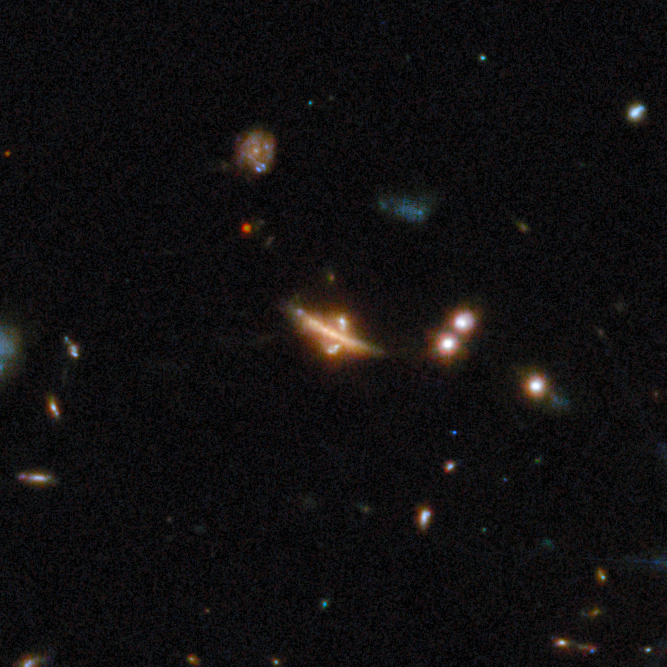

Gravitational lens COSJ100025+015245

Somewhat resembling a ringed planet at first glance, this lens is markedly different from the others presented in the Picture of the Month compilation of gravitational lenses from the COSMOS-Web survey. This shows a rare case in which the lensing galaxy is a thin disc galaxy rather than a giant elliptical galaxy. The dust within the disc absorbs the source’s light, providing a valuable opportunity to study dust in very distant galaxies.

This gravitational lens is one of eight featured in the September 2025 Picture of the Month.

Credit: ESA/Webb, NASA & CSA, G. Gozaliasl, A. Koekemoer, M. Franco